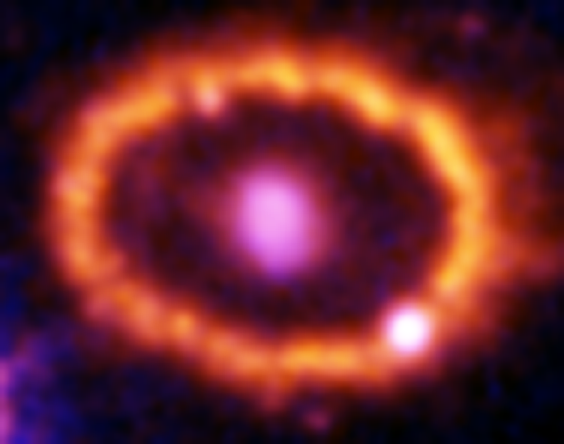

Hubble Supernova 1987A Scrapbook (1994-2003) - Image 4

in 1987, astronomers spotted the brightest stellar explosion ever seen since the one observed by Johannes Kepler over 400 years ago. Called SN 1987A, the titanic supernova explosion blazed with the power of 100,000,000 suns for several months following its discovery on Feb. 23 of that year. Although the supernova itself is over a million times fainter than when it was first discovered, a new light show in the space surrounding it is just beginning.

Credit: NASA/ESA, P. Challis, R. Kirshner (Harvard-Smithsonian Center for Astrophysics) and B. Sugerman (STScI)